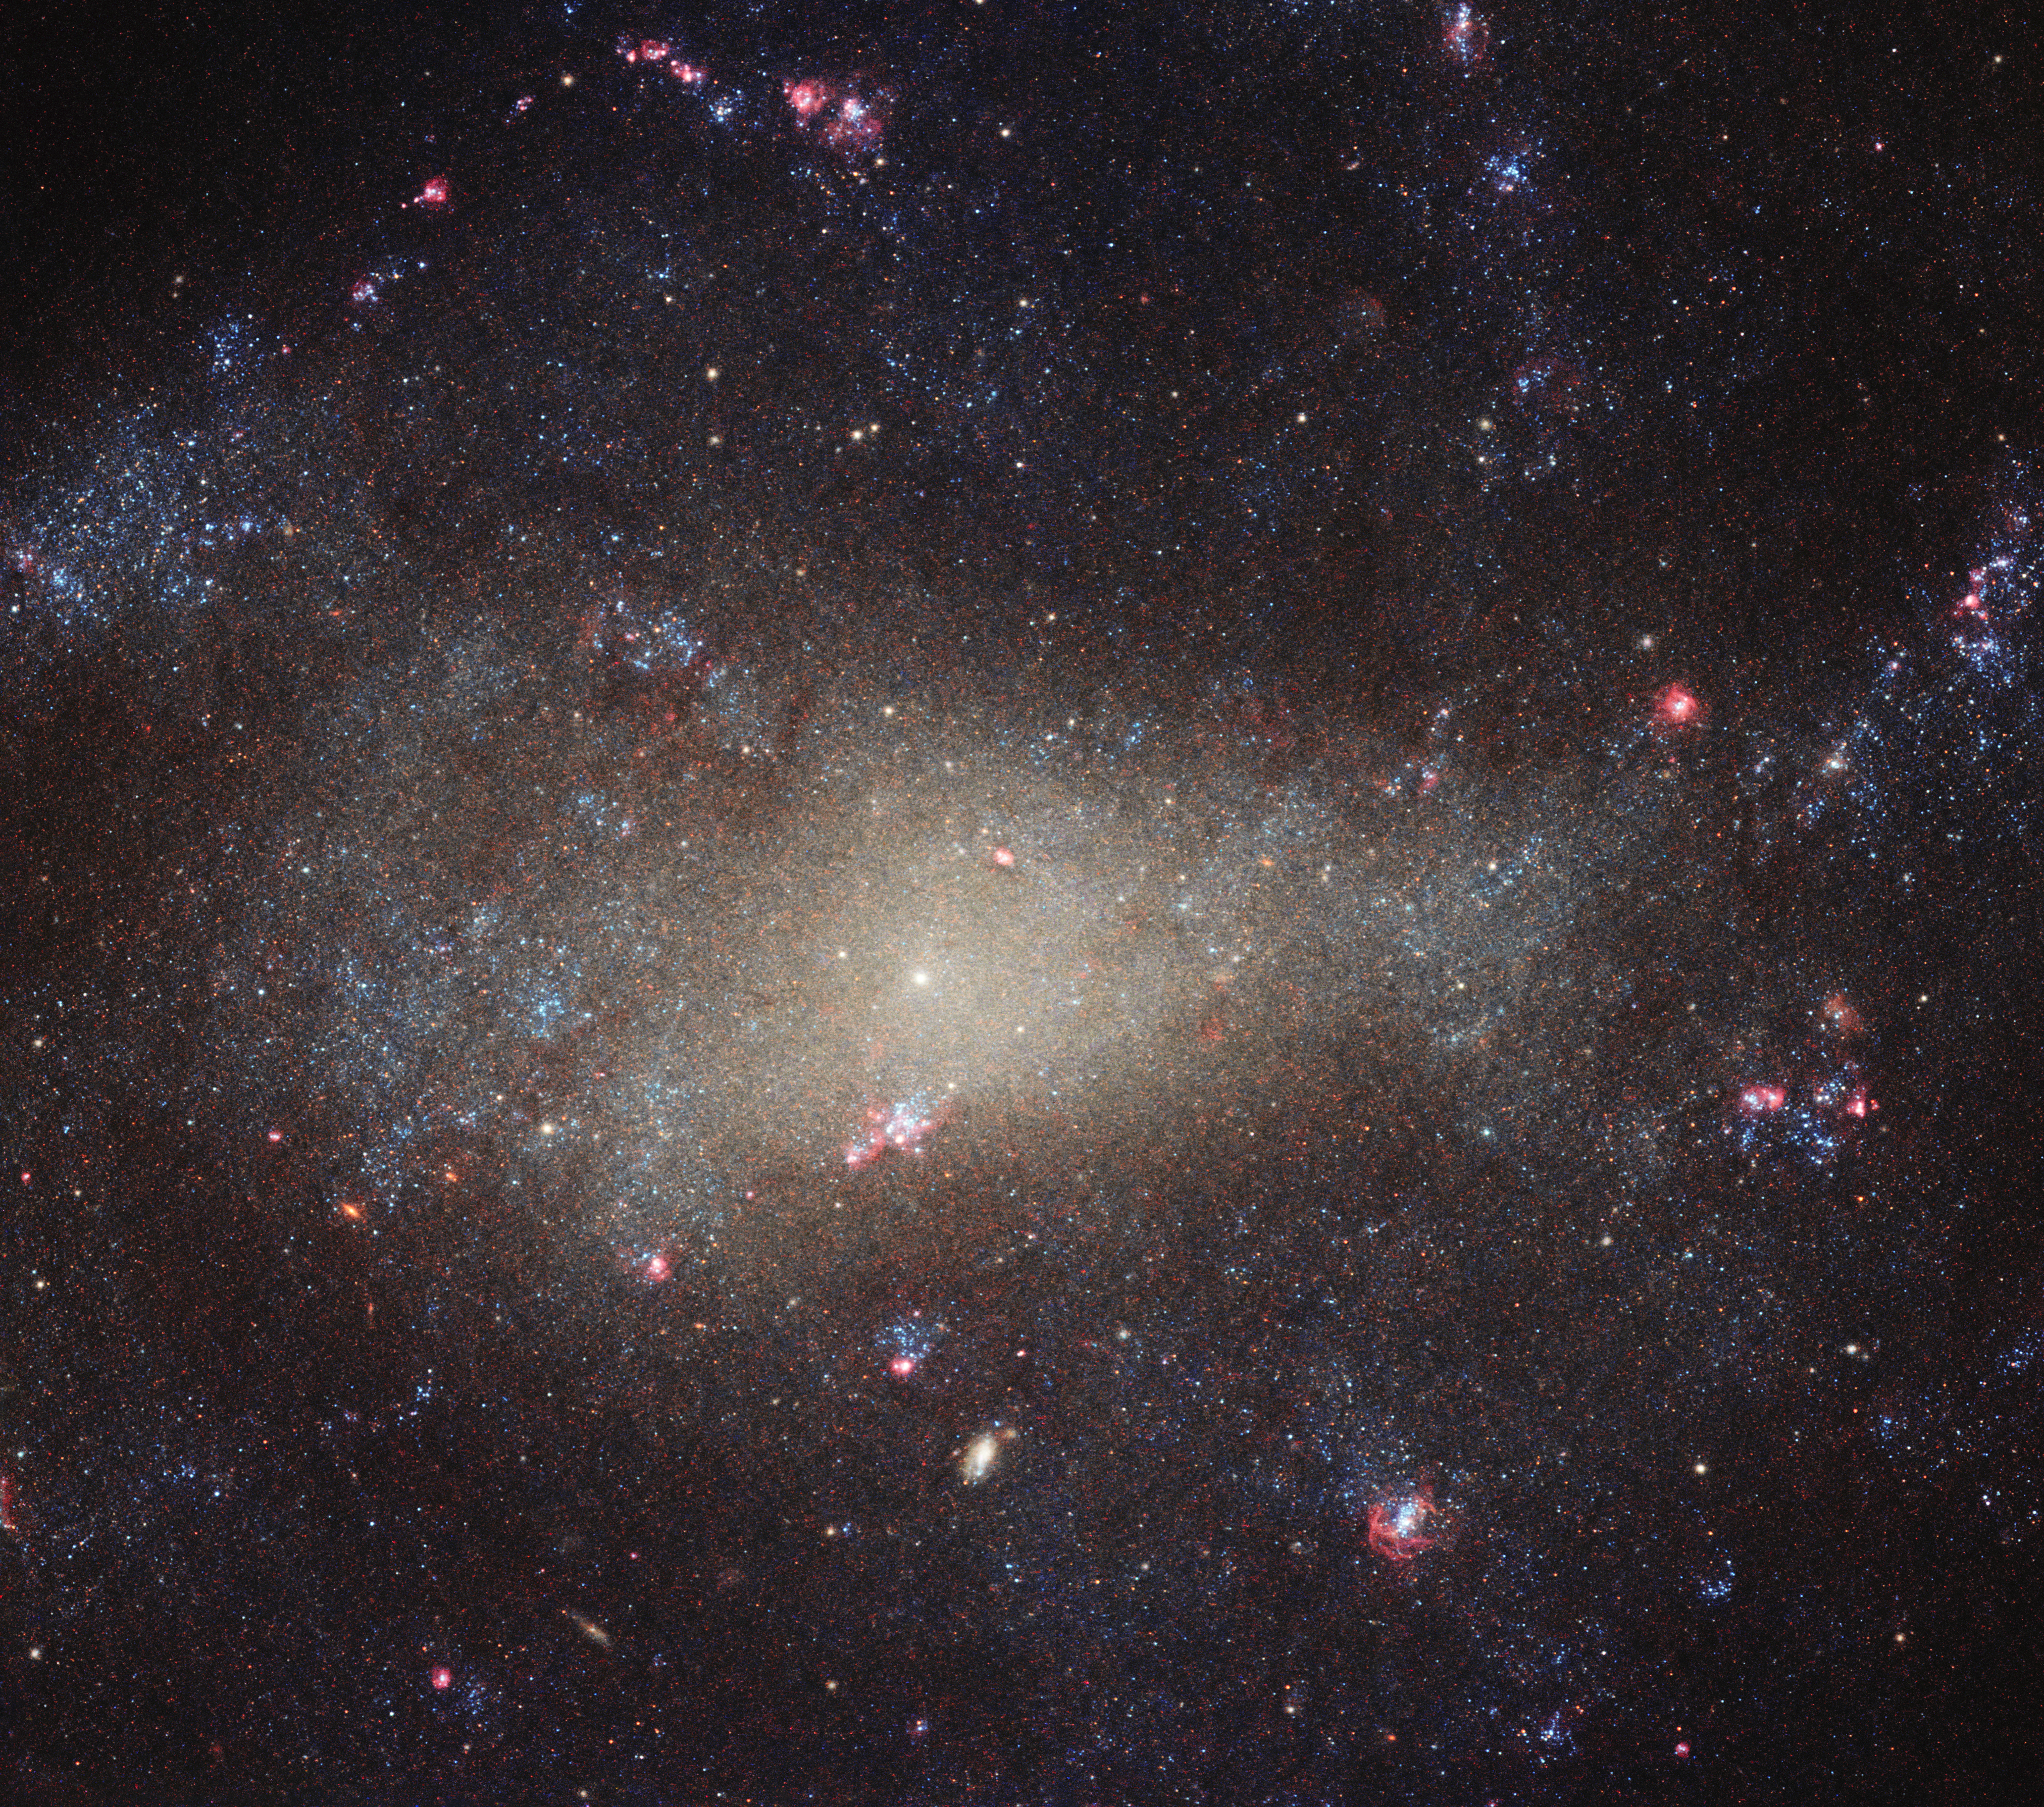

Dim and diffuse

Tucked away in the small northern constellation of Canes Venatici (The Hunting Dogs) is the galaxy NGC 4242, shown here as seen by the NASA/ESA Hubble Space Telescope. The galaxy lies some 30 million light-years from us. At this distance from Earth, actually not all that far on a cosmic scale, NGC 4242 is visible to anyone armed with even a basic telescope (as British astronomer William Herschel found when he discovered the galaxy in 1788).

This image shows the galaxy’s bright centre and the surrounding dimmer and more diffuse “fuzz”. Despite appearing to be relatively bright in this image, studies have found that NGC 4242 is actually relatively dim (it has a moderate-to-low surface brightness and low luminosity) and also supports a low rate of star formation. The galaxy also seems to have a weak bar of stars cutting through its asymmetric centre, and a very faint and poorly-defined spiral structure throughout its disc. But if NGC 4242 is not all that remarkable, as with much of the Universe, it is still a beautiful and ethereal sight.

Credit: ESA/Hubble & NASA